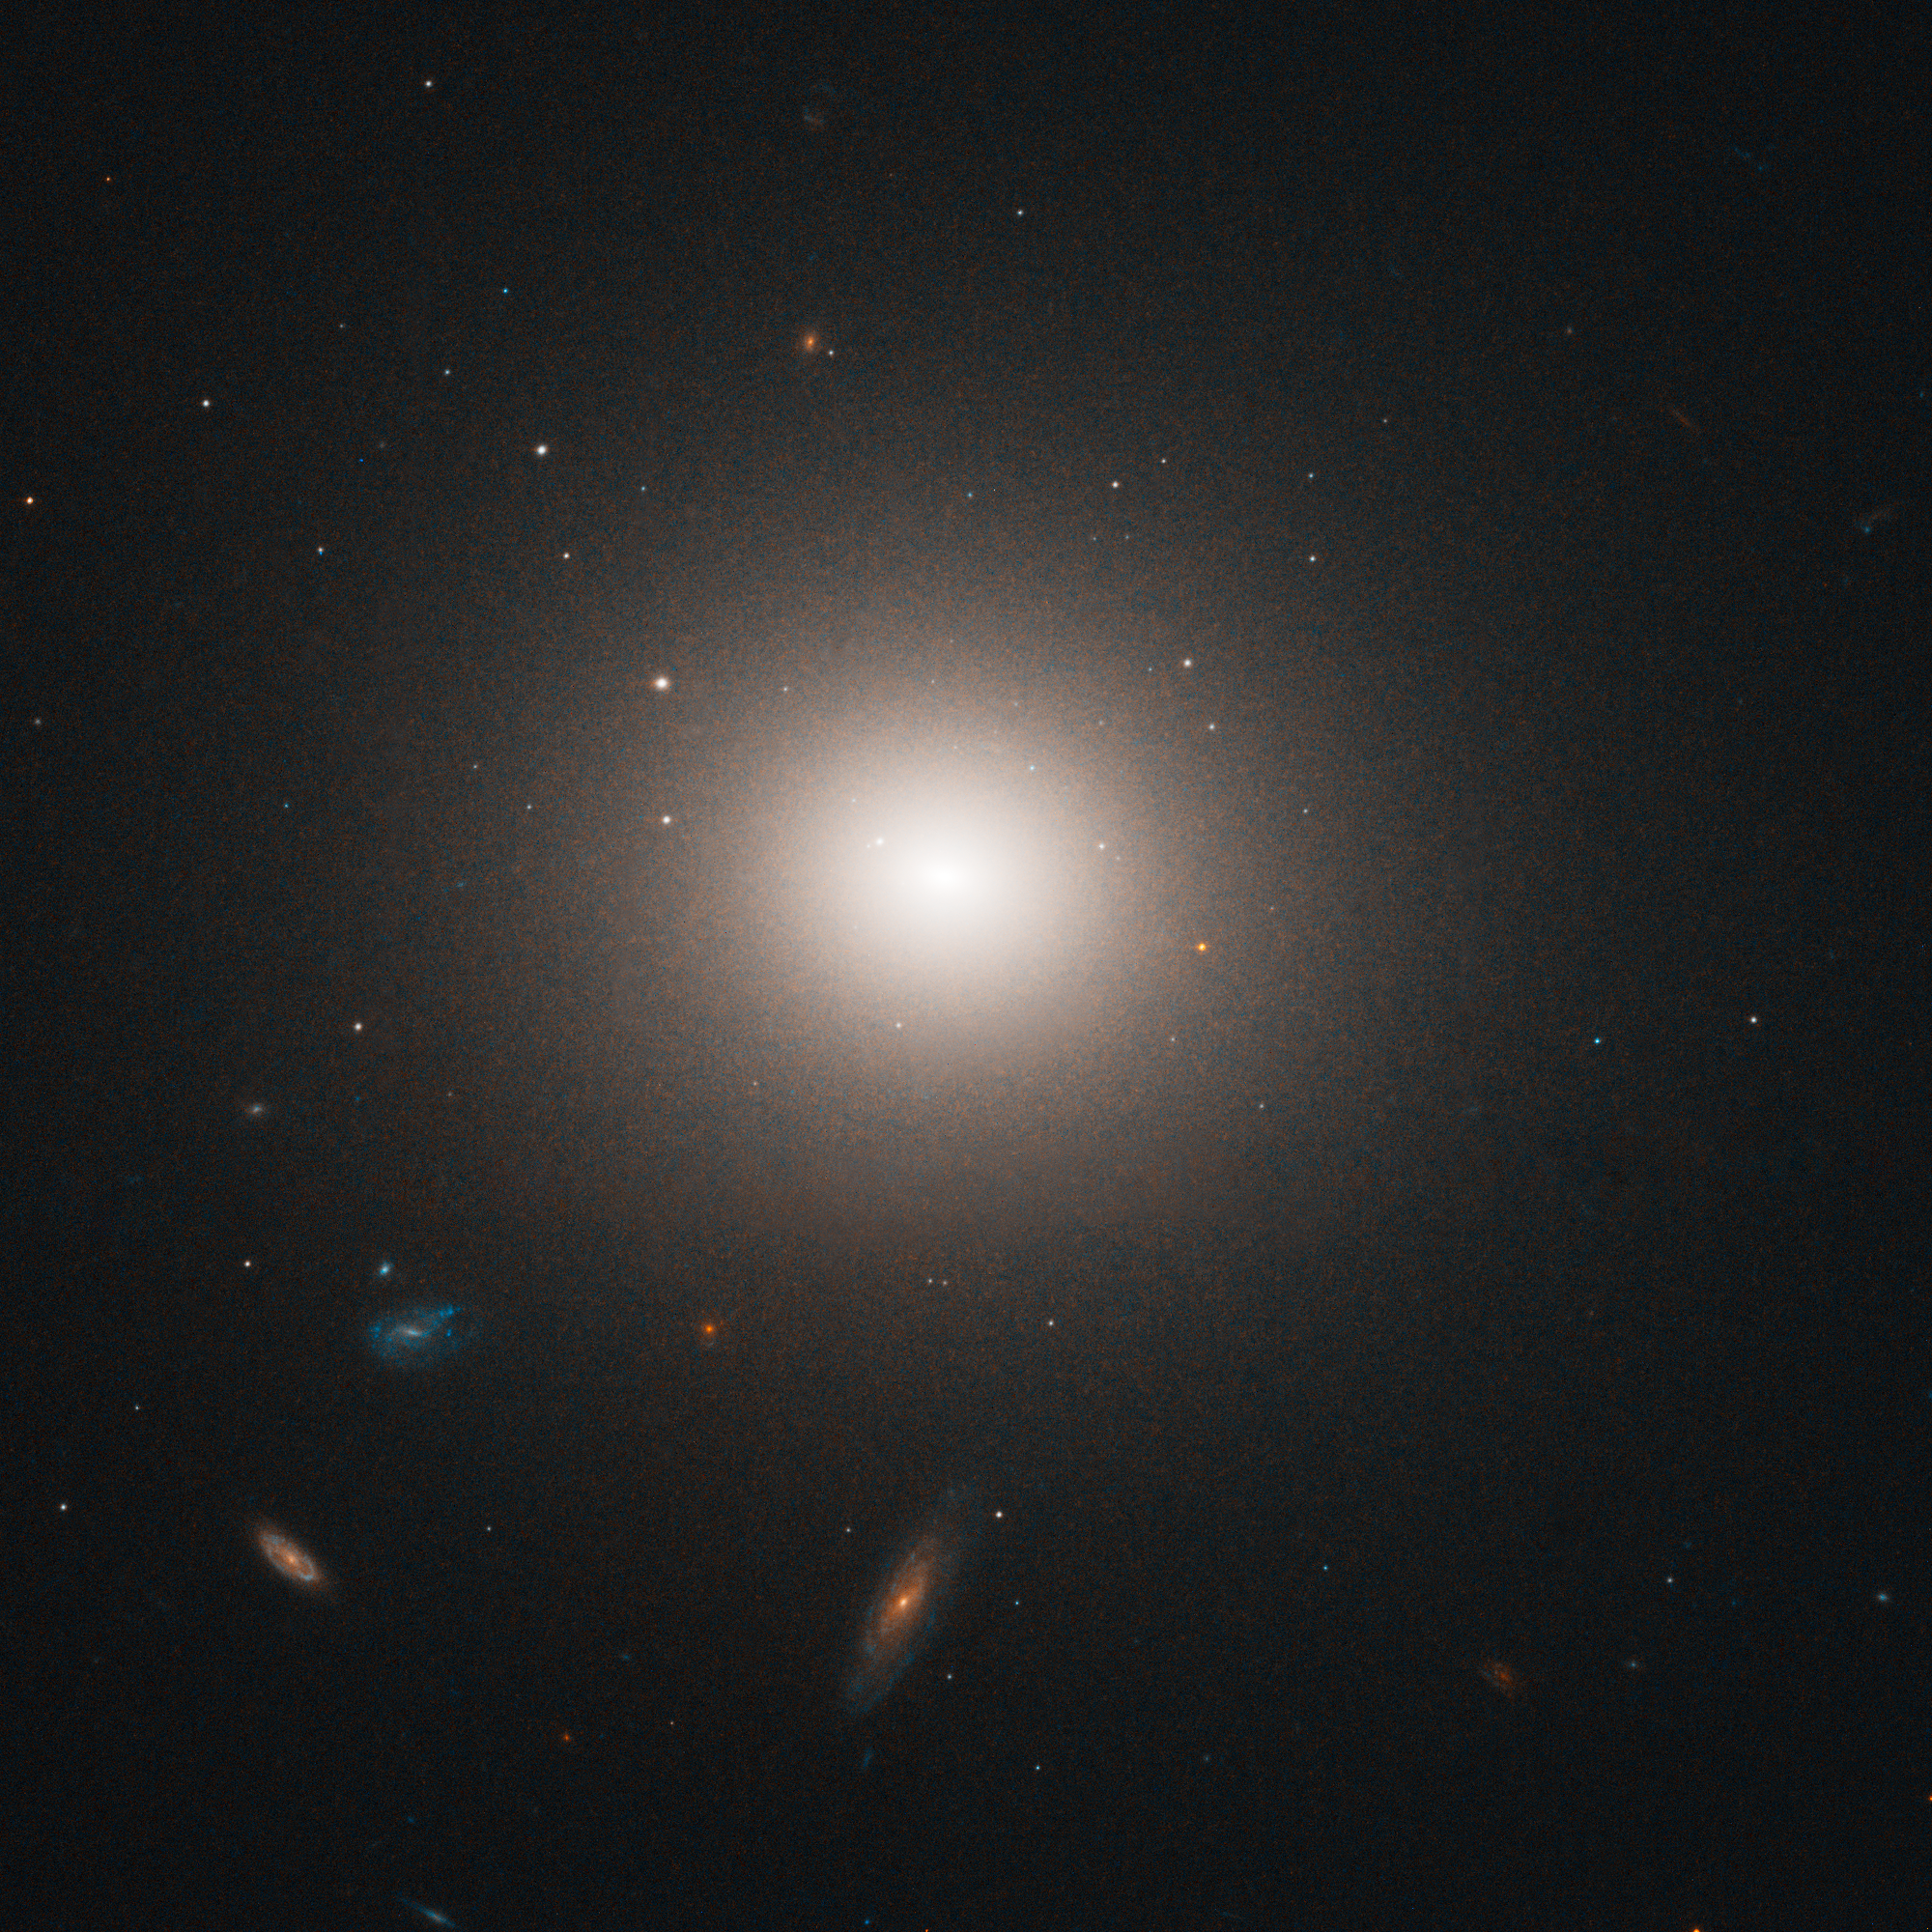

NGC 4458 in the Virgo cluster of galaxies

Virgo cluster galaxy NGC 4458. Hubble's "eye" is so sharp that it was able to pick out the fuzzy globular clusters, which, at that distance, look like individual stars bunched up around the galaxies, instead of groupings of stars.

Credit: ESA, NASA and E. Peng (Peking University, Beijing)